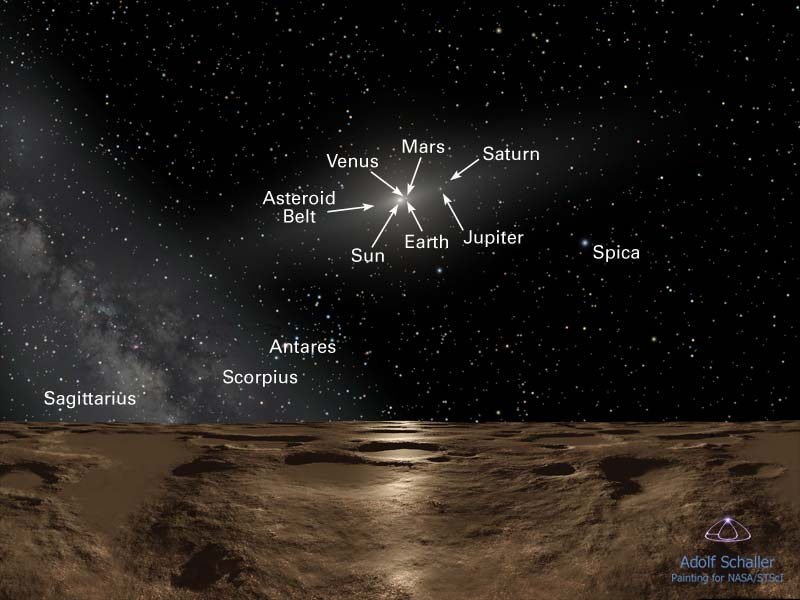

Sedna mystery deepens as Hubble offers best look at farthest planetoid

This is an artist's impression of noontime on Sedna, the farthest known planetoid from the Sun. Over 8 billion miles away (almost 13 billion kilometres away), the Sun is reduced to a brilliant pinpoint of light that is 100 times brighter than the full Moon. (The Sun would actually be the angular size of Saturn as seen from Earth, way too small to be resolved with the human eye.) The dim spindle-shaped glow of dust around the Sun defines the ecliptic plane of the solar system where the major planets dwell. To the left, the hazy plane of our Galaxy, the Milky Way, stretches into the sky. The background constellations are Virgo and Libra.

At this distance the Sun's feeble rays are nearly one four-thousandth the intensity of what they are at Earth. This means that Sedna is eternally cold at minus 400 degrees Fahrenheit (about minus 240 degrees Celsius), which means that the planetoid is airless and icy. Life, as we know it, could never live here. But if anything could survive, it would have an intriguing global view of the entire solar system. A fifth-magnitude object, barely three degrees from the Sun (the pinpoint at the two o'clock position) is Jupiter. Saturn is also visible as a dim star. Earth would be only half a degree from the Sun and, at ninth magnitude, only be visible in powerful binoculars. To our imaginary "Sednian" astronomers, all the planets would be in inferior orbits (meaning interior to Sedna's orbit). This means they would best be seen in the predawn morning sky and post sunset evening sky, but never at midnight.

Credit: NASA, ESA and Adolf Schaller